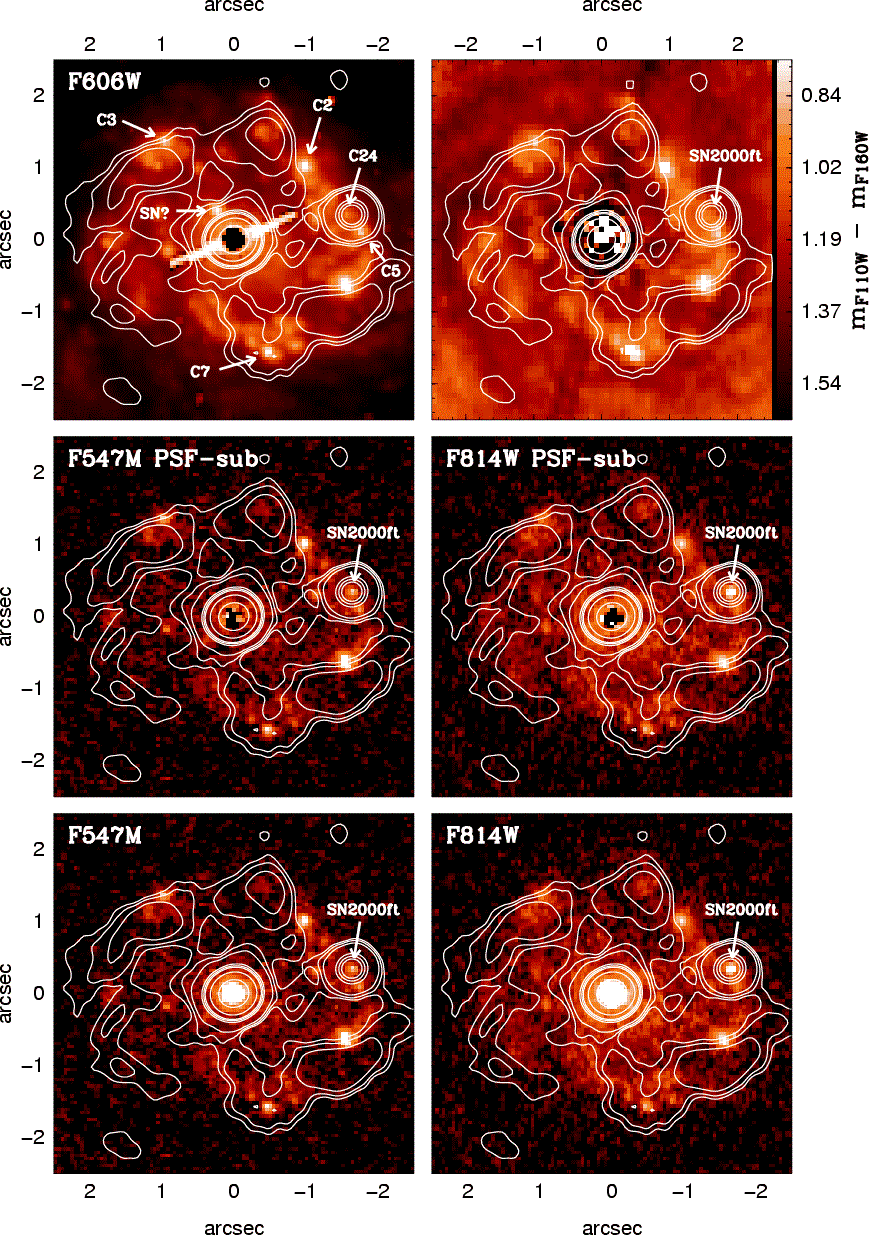

The nucleus and circumnuclear star-forming ring of NGC 7469

HST images of the nucleus and circumnuclear star-forming ring of NGC 7469 in the available optical filters. Contours represent the VLA 8.4 GHz image taken on 27 October 2000 when the supernova SN 2000ft was first detected. Image taken from Colina et al. 2007.

Credit: ESA, NASA, L. Colina (CSIC-IEM)